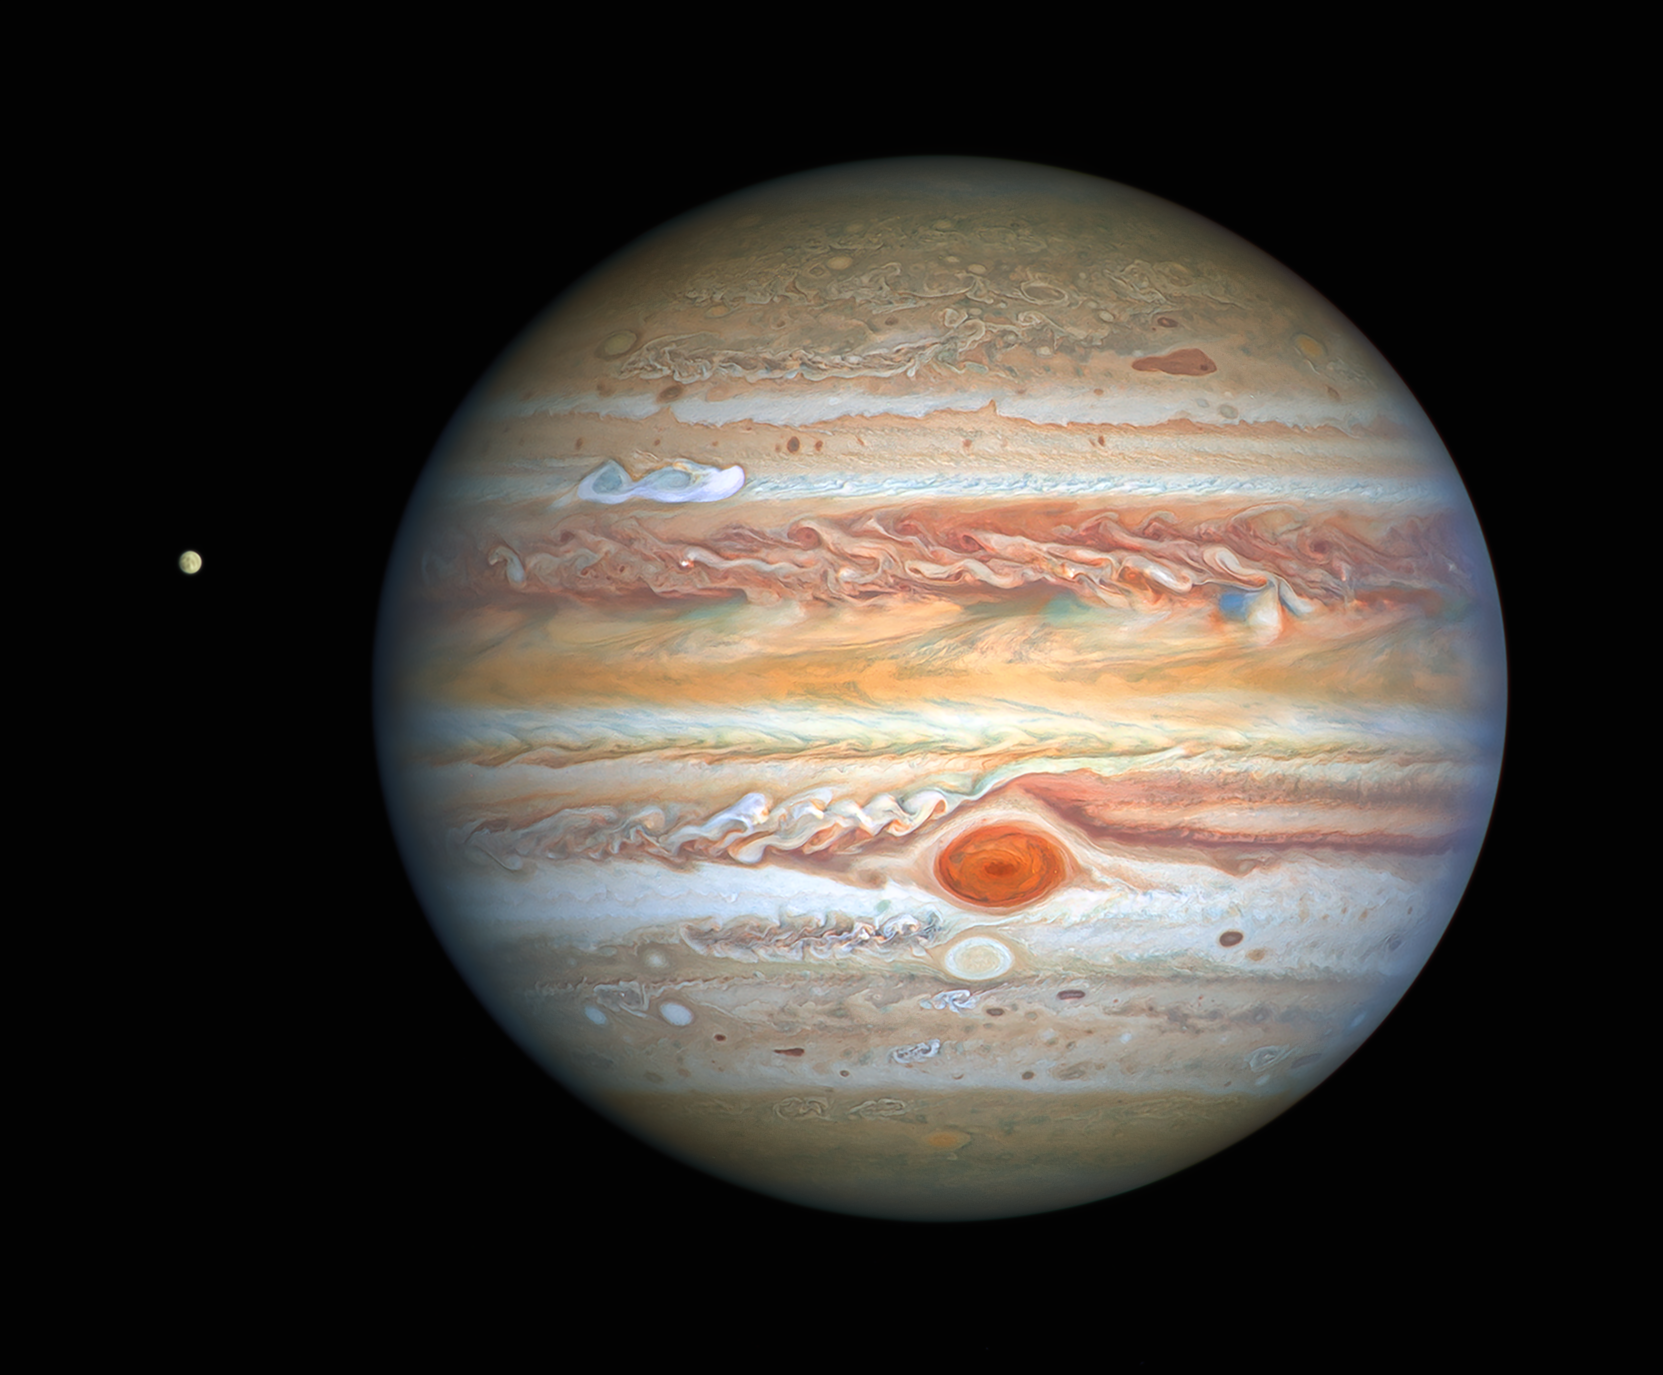

Hubble's View of Jupiter and Europa in August 2020

This latest image of Jupiter, taken by the NASA/ESA Hubble Space Telescope on 25 August 2020, was captured when the planet was 653 million kilometres from Earth. Hubble’s sharp view is giving researchers an updated weather report on the monster planet’s turbulent atmosphere, including a remarkable new storm brewing, and a cousin of the Great Red Spot changing colour — again. The new image also features Jupiter’s icy moon Europa.

Credit: NASA, ESA, A. Simon (Goddard Space Flight Center), and M. H. Wong (University of California, Berkeley) and the OPAL team.